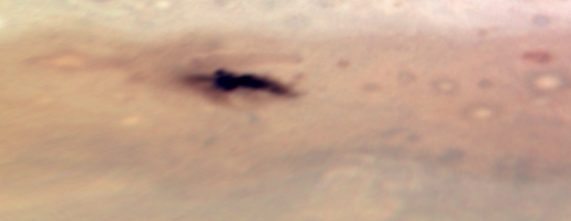

Jupiter: 23 July 2009

Image taken with Hubble's Wide Field Camera 3 on 23 July 2009.

Credit: NASA, ESA, H. Hammel (Space Science Institute, Boulder, Colo.), and the Jupiter Impact Team